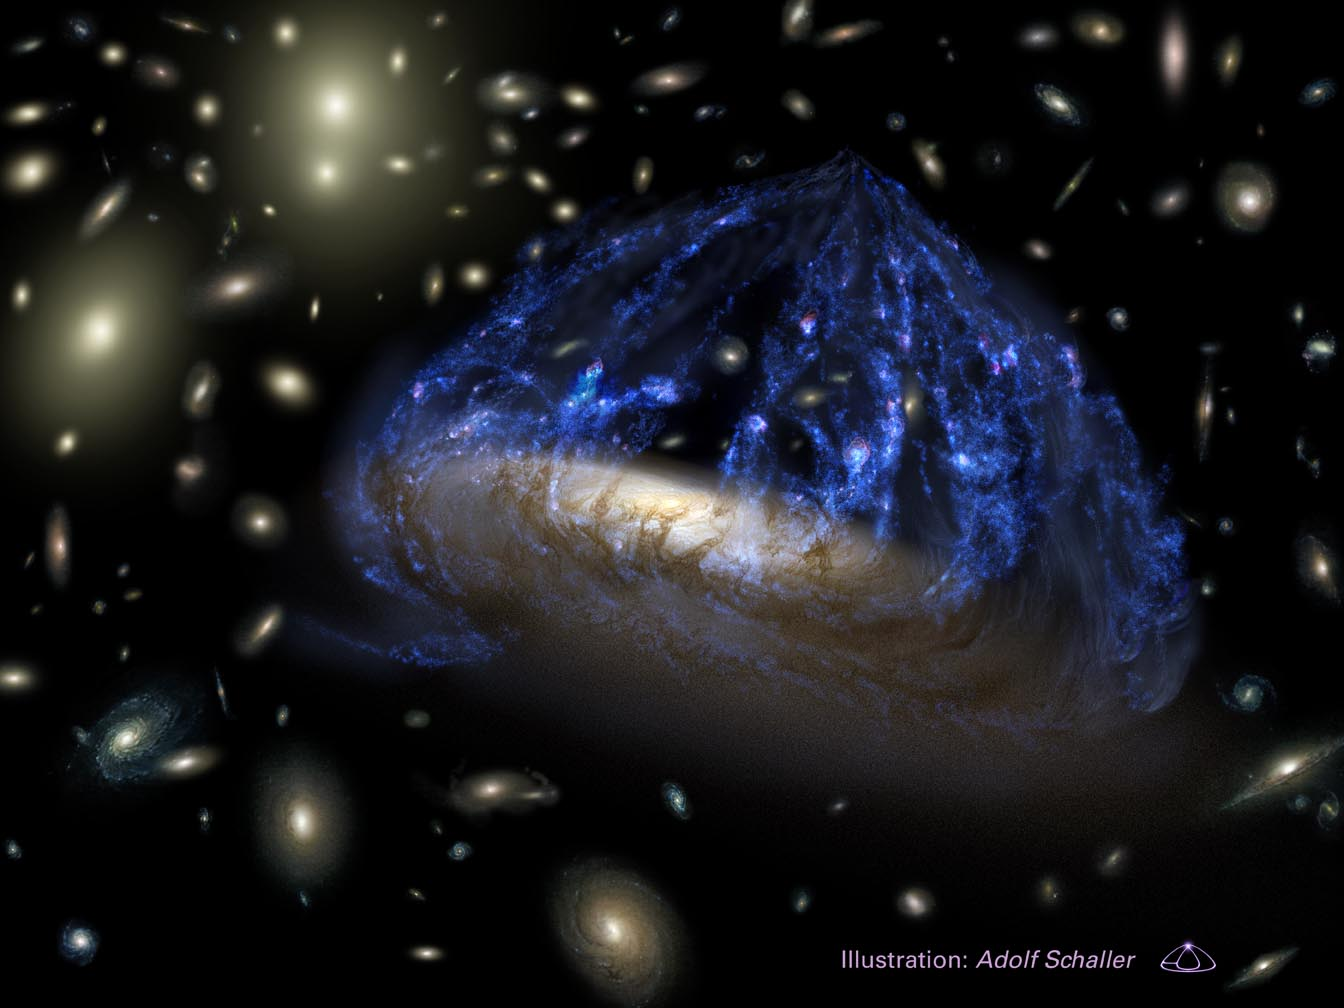

Artist's View of C153 in Abell 2125

The galaxy C153 is destined to lose the last vestiges of its spiral arms and become a bland S0-type galaxy having a central bulge and disk, but no spiral-arm structure. These types of galaxies are common in the dense galaxy clusters seen today.

Credit: Adolf Schaller